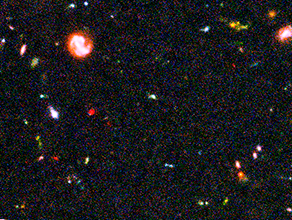

Hubble Ultra Deep Field Most-Distant Galaxy Candidates - Close-up 1

This image of the Hubble Ultra Deep Field (HUDF) — a small region of sky in the direction of the southern constellation Fornax — shows some of the earliest star-forming galaxies in the Universe.

The sensitivity of Hubble's Advanced Camera for Surveys (ACS), combined with the penetrating power of the Near Infrared Camera and Multi-Object Spectrometer (NICMOS) have finally revealed these long-sought after faint galaxies. Some of these faint objects are less than one four-billionth the brightness of stars that can be seen with the naked eye and their light has taken nearly 13 billion years to reach Earth.

Credit: NASA, ESA, R. Windhorst (Arizona State University) and H. Yan (Spitzer Science Center, Caltech)